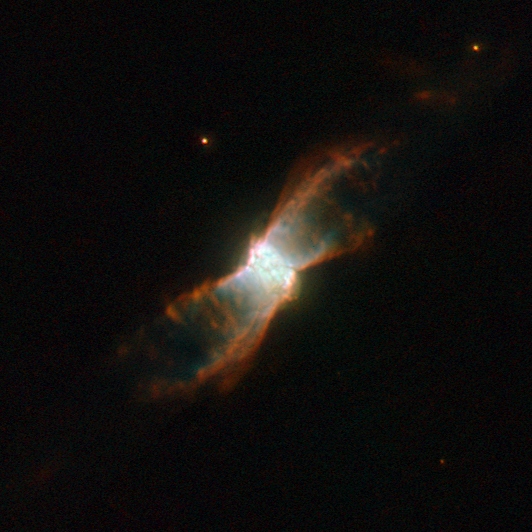

Stellar voyage of a butterfly-like planetary nebula

The breathtaking butterfly-like planetary nebula NGC 6881 is visible here in an image taken by the NASA/ESA Hubble Space Telescope. Located in the constellation of Cygnus, it is formed of an inner nebula, estimated to be about one fifth of a light-year across, and symmetrical “wings” that spread out about one light-year from one tip to the other. The symmetry could be due to a binary star at the nebula’s centre.

NGC 6881 has a dying star at its core which is about 60% of the mass of the Sun. It is an example of a quadrupolar planetary nebula, made from two pairs of bipolar lobes pointing in different directions, and consisting of four pairs of flat rings. There are also three rings in the centre.

A planetary nebula is a cloud of ionised gas, emitting light of various colours. It typically forms when a dying star — a red giant — throws off its outer layers, because of pulsations and strong stellar winds.

The star’s exposed hot, luminous core starts emitting ultraviolet radiation, exciting the outer layers of the star, which then become a newly born planetary nebula. At some point, the nebula is bound to dissolve in space, leaving the central star as a white dwarf — the final evolutionary state of stars.

The name “planetary” dates back to the 18th century, when such nebulae were first discovered — and when viewed through small optical telescopes, they looked a lot like giant planets.

Planetary nebulae usually live for a few tens of thousands of years, a short phase in the lifetime of a star.

The image was taken through three filters which isolate the specific wavelength of light emitted by nitrogen (shown in red), hydrogen (shown in green) and oxygen (shown in blue).

Credit: ESA/Hubble & NASA